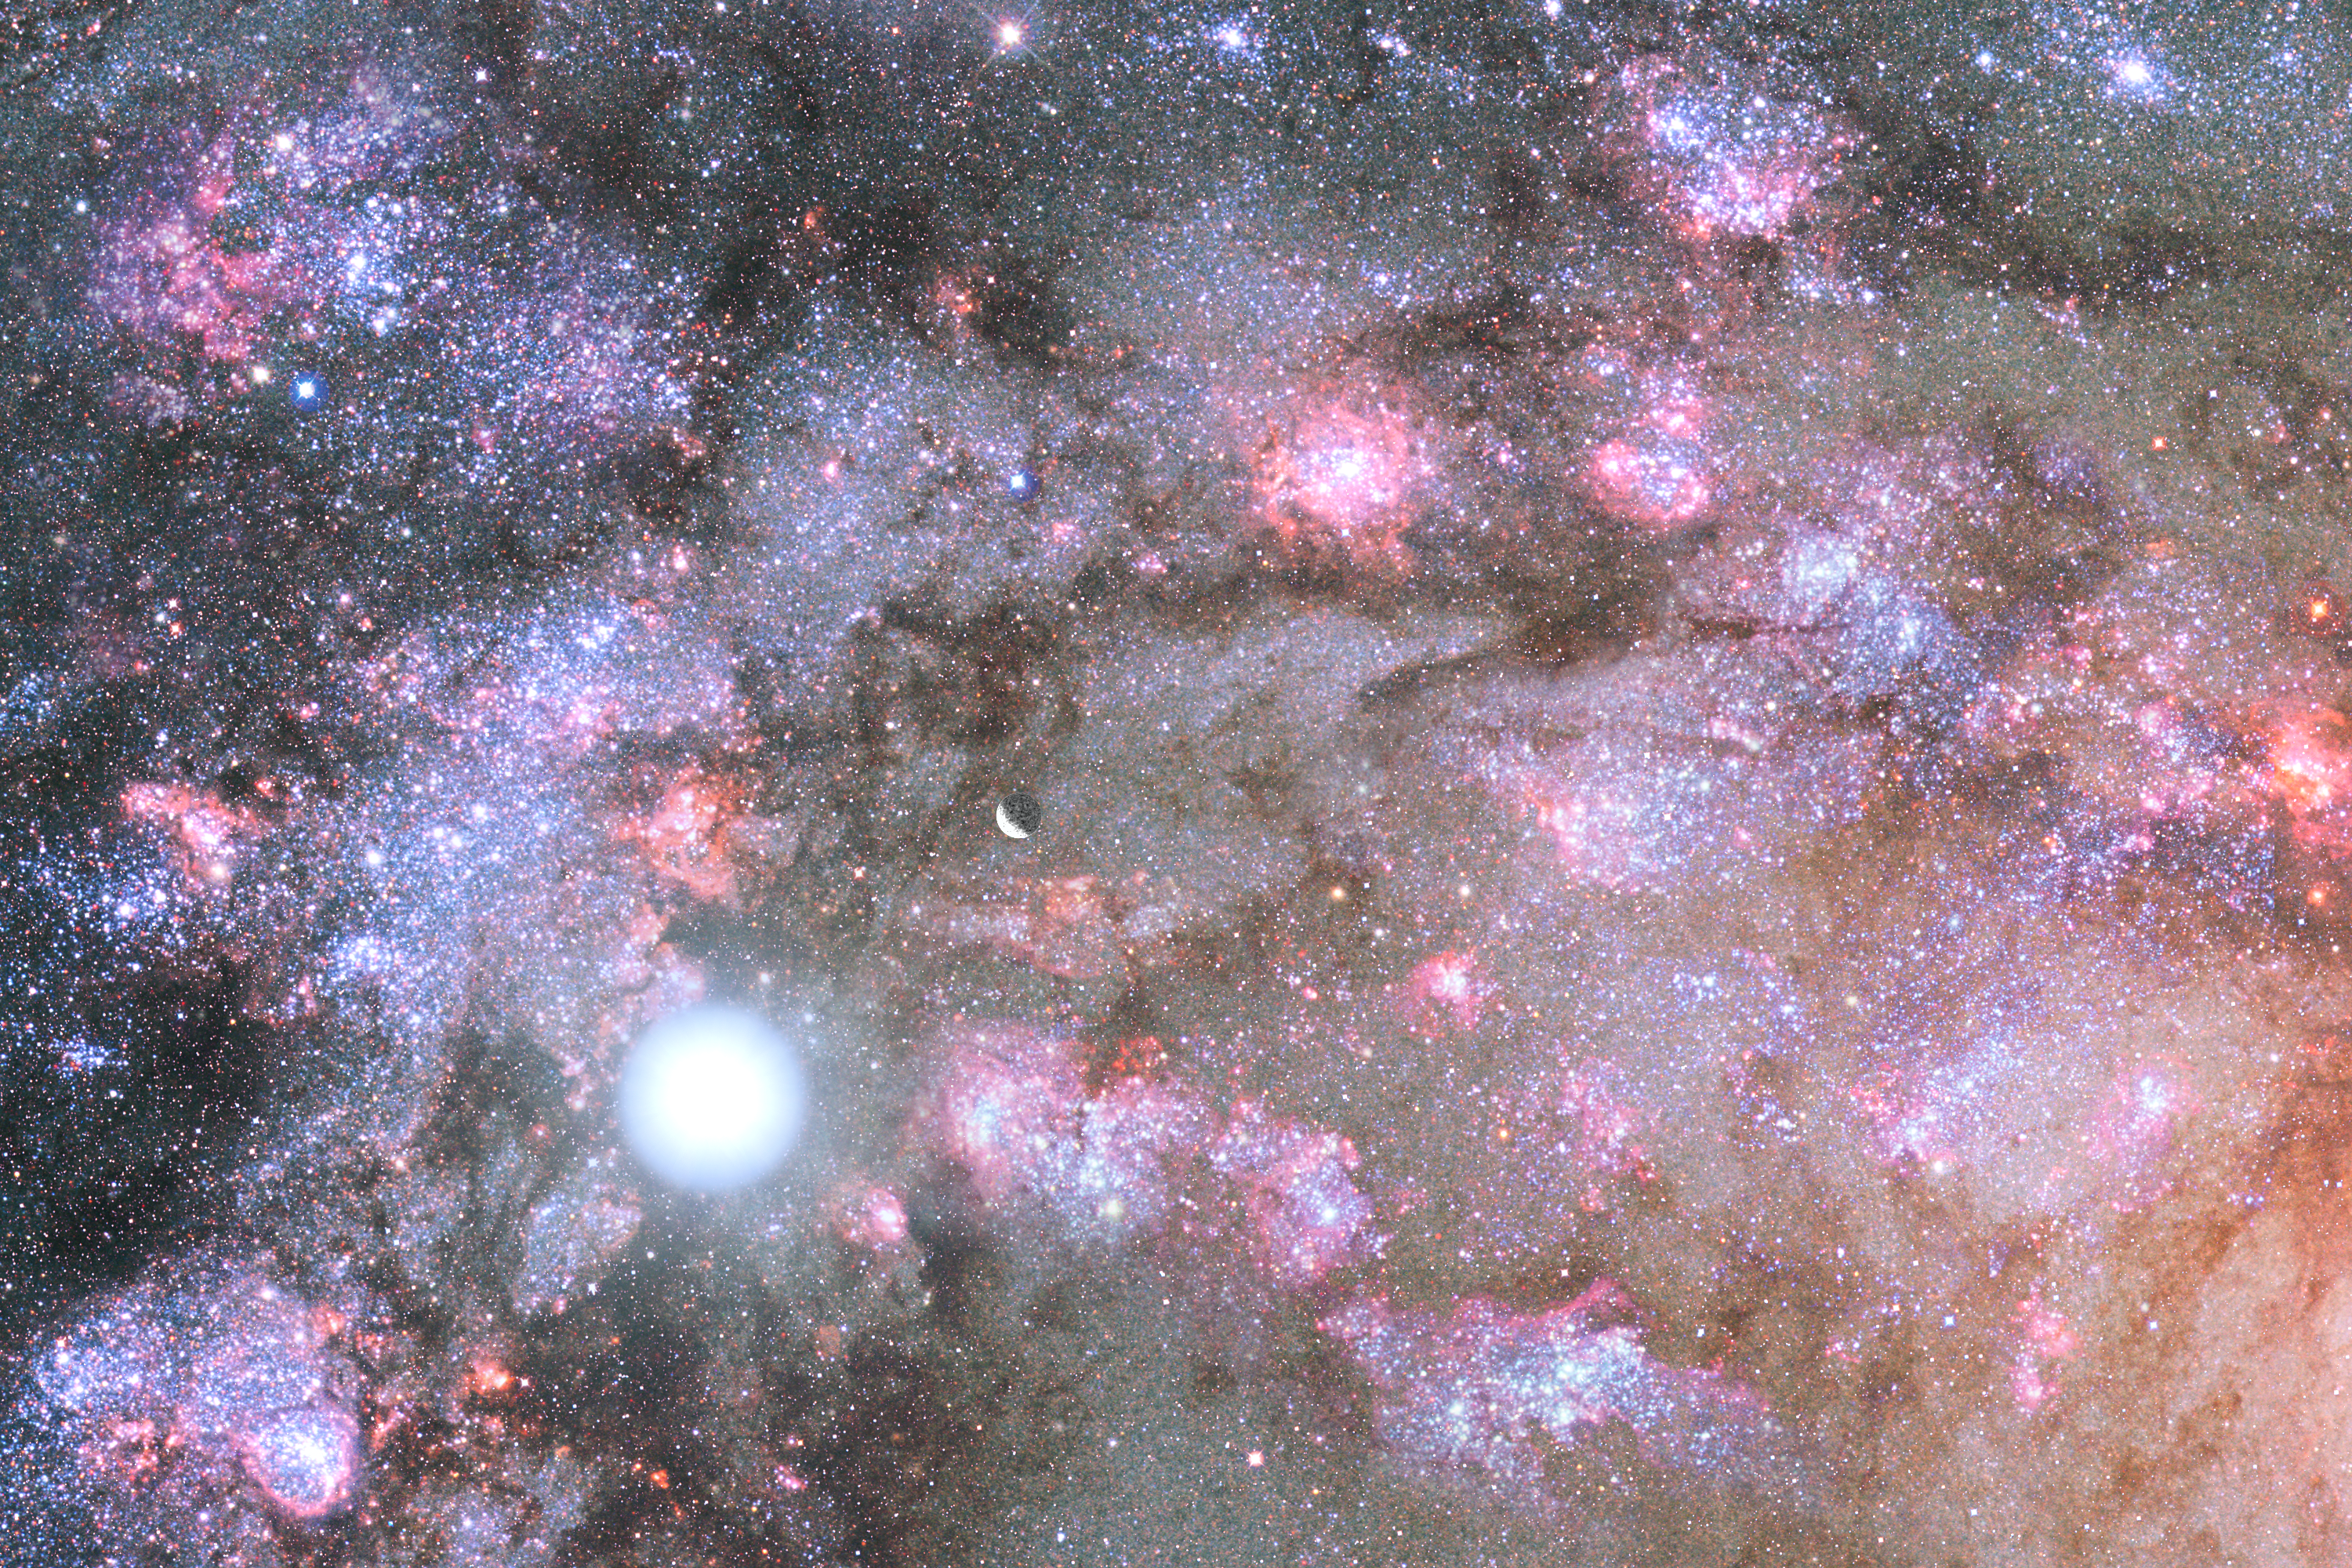

A Cauldron of Star Birth in the Center of a Young Galaxy

This illustration reveals the celestial fireworks deep inside the core of a developing galaxy in the young Universe, as seen from a hypothetical planetary system.

The sky is depicted as ablaze with the glow from nebulae, fledgling star clusters, and stars exploding as supernovae.

The rapidly forming core may eventually become the heart of a mammoth galaxy similar to one of the giant elliptical galaxies seen today.

Credit: NASA, ESA, Z. Levay and G. Bacon (Space Telescope Science Institute)